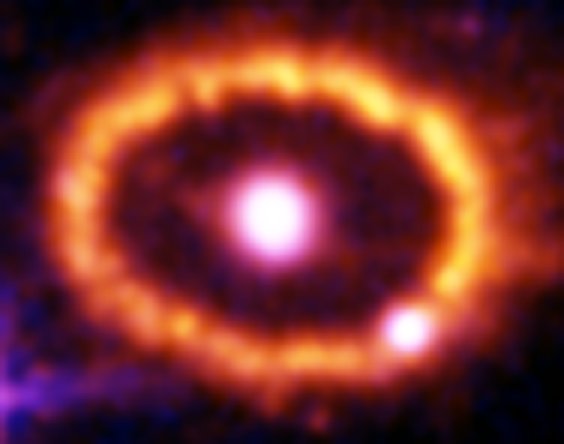

Hubble Supernova 1987A Scrapbook (1994-2003) - Image 2

in 1987, astronomers spotted the brightest stellar explosion ever seen since the one observed by Johannes Kepler over 400 years ago. Called SN 1987A, the titanic supernova explosion blazed with the power of 100,000,000 suns for several months following its discovery on Feb. 23 of that year. Although the supernova itself is over a million times fainter than when it was first discovered, a new light show in the space surrounding it is just beginning.

Credit: NASA/ESA, P. Challis, R. Kirshner (Harvard-Smithsonian Center for Astrophysics) and B. Sugerman (STScI)